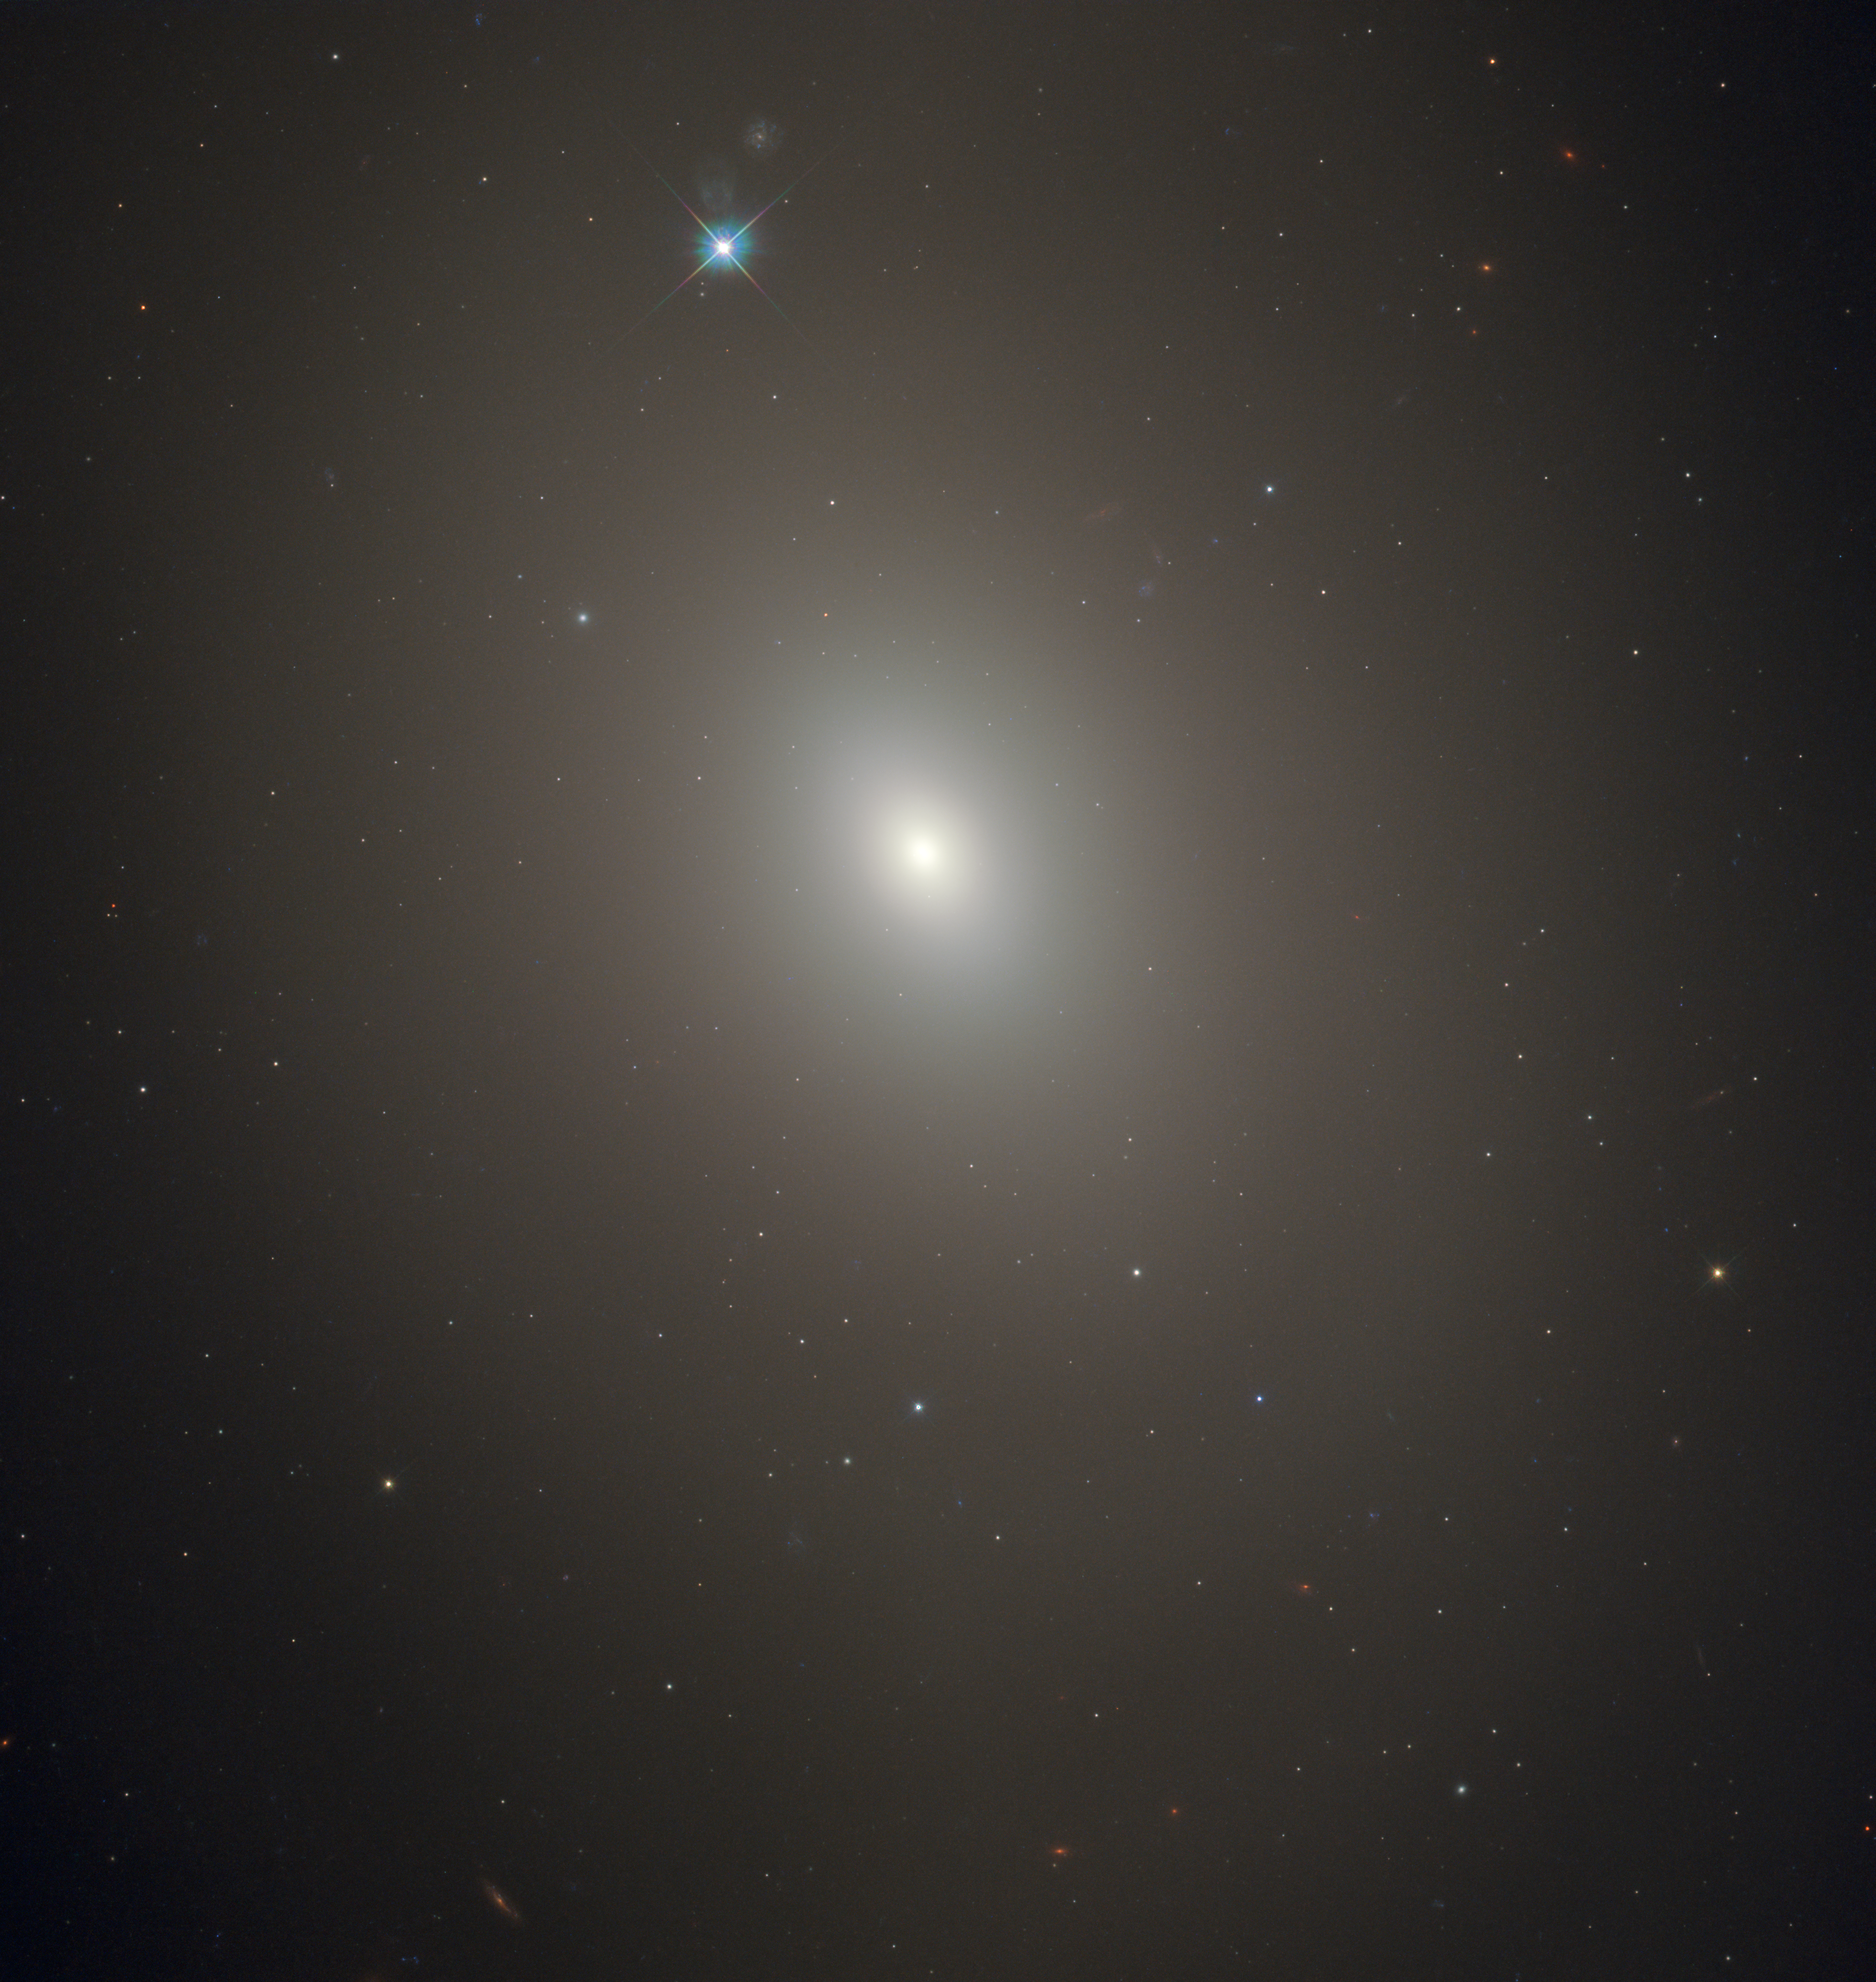

The darkness within?

This atmospheric image shows a galaxy named Messier 85, captured in all its delicate, hazy glory by the NASA/ESA Hubble Space Telescope. Messier 85 slants through the constellation of Coma Berenices (Berenice’s Hair), and lies around 50 million light-years from Earth. It was first discovered by Charles Messier’s colleague Pierre Méchain in 1781, and is included in the Messier catalogue of celestial objects.

Messier 85 is intriguing — its properties lie somewhere between those of a lenticular and an elliptical galaxy, and it appears to be interacting with two of its neighbours: the beautiful spiral NGC 4394, located out of frame to the upper left, and the small elliptical MCG 3-32-38, located out of frame to the centre bottom.

The galaxy contains some 400 billion stars, most of which are very old. However, the central region hosts a population of relatively young stars of just a few billion years in age; these stars are thought to have formed in a late burst of star formation, likely triggered as Messier 85 merged with another galaxy over four billion years ago. Messier 85 has a further potentially strange quality. Almost every galaxy is thought to have a supermassive black hole at its centre, but from measurements of the velocities of stars in this galaxy, it is unclear whether Messier 85 contains such a black hole.

This image combines infrared, visible and ultraviolet observations from Hubble’s Wide Field Camera 3.

Credit: ESA/Hubble & NASA, R. O'Connell